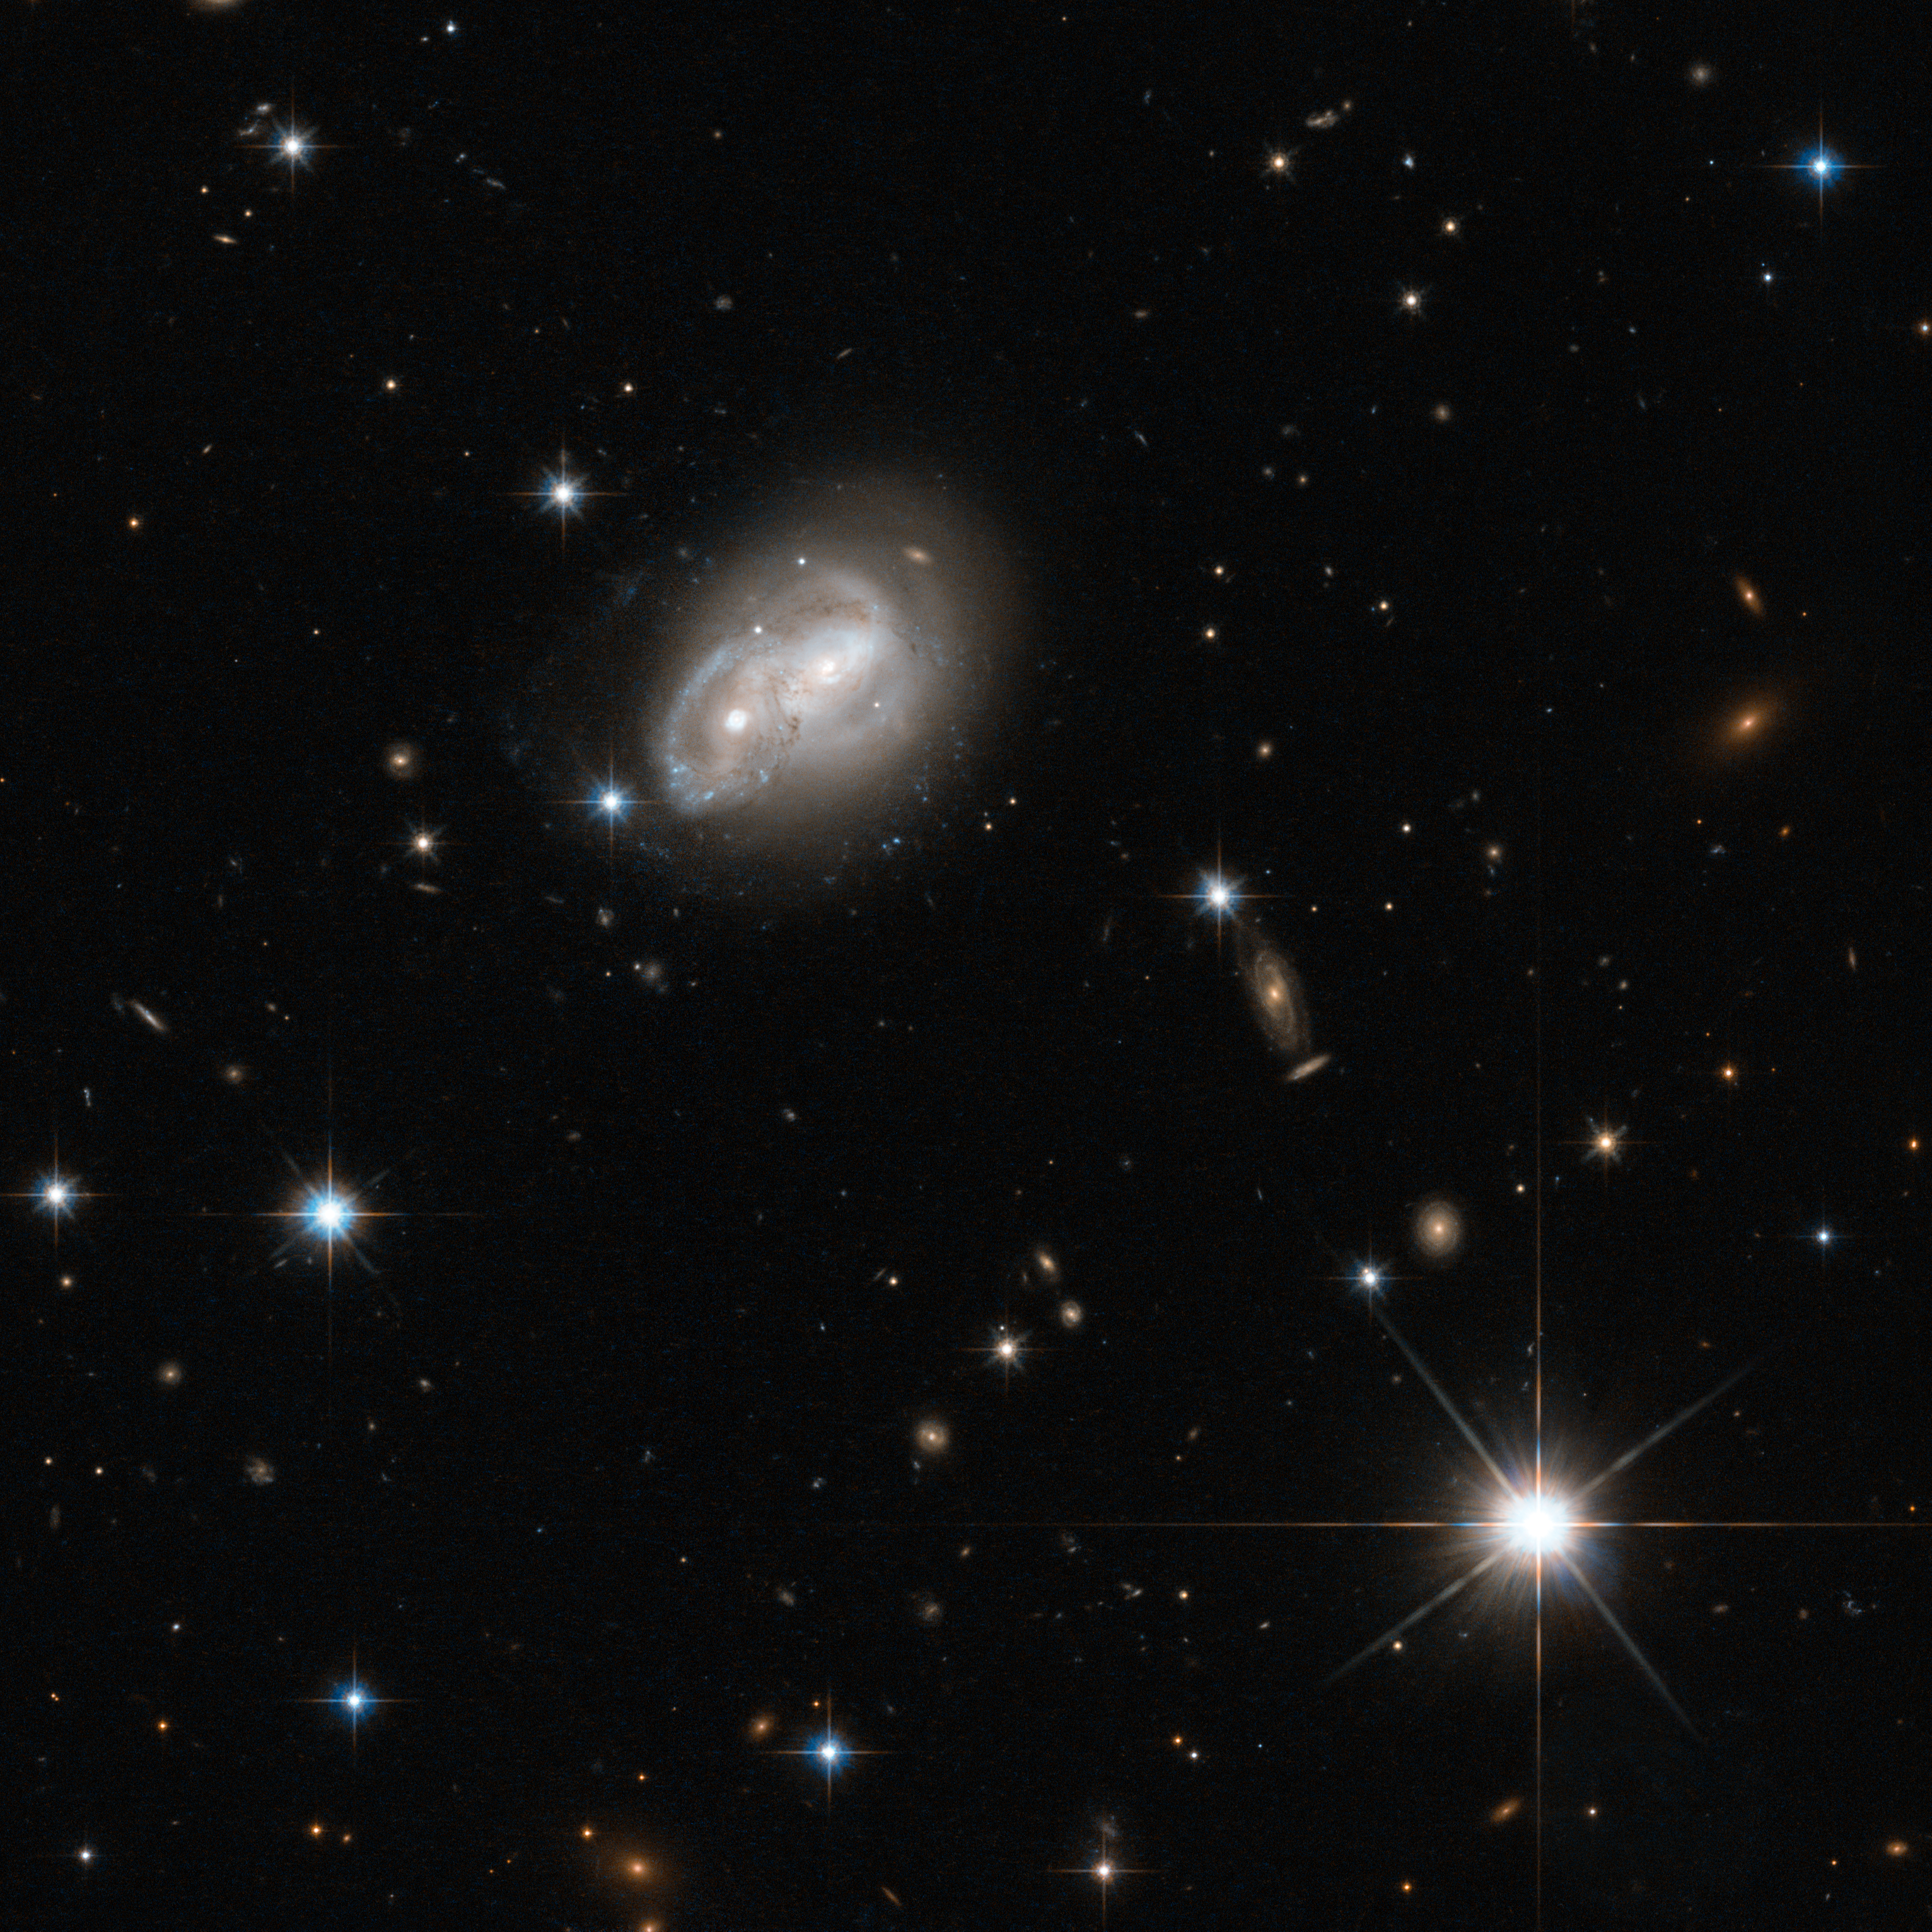

Galaxy gets a cosmic hair ruffling

From objects as small as Newton's apple to those as large as a galaxy, no physical body is free from the stern bonds of gravity, as evidenced in this stunning picture captured by the Wide Field Camera 3 and Advanced Camera for Surveys onboard the NASA/ESA Hubble Space Telescope.

Here we see two spiral galaxies engaged in a cosmic tug-of-war — but in this contest, there will be no winner. The structures of both objects are slowly distorted to resemble new forms, and in some cases, merge together to form new, super galaxies. This particular fate is similar to that of the Milky Way Galaxy, when it will ultimately merge with our closest galactic partner, the Andromeda Galaxy. There is no need to panic however, as this process takes several hundreds of millions of years.

Not all interacting galaxies result in mergers though. The merger is dependent on the mass of each galaxy, as well as the relative velocities of each body. It is quite possible that the event pictured here, romantically named 2MASX J06094582-2140234, will avoid a merger event altogether, and will merely distort the arms of each spiral without colliding — the cosmic equivalent of a hair ruffling!

These galactic interactions also trigger new regions of star formation in the galaxies involved, causing them to be extremely luminous in the infrared part of the spectrum. For this reason, these types of galaxies are referred to as LIRGs, or Luminous Infrared Galaxies. This image was taken as part of as part of a Hubble survey of the central regions of LIRGs in the local Universe, which also used the NICMOS instrument.

A version of this image was entered into the Hubble's Hidden Treasures image processing competition by contestant Luca Limatola.

Credit: ESA/Hubble & NASA Acknowledgement: Luca Limatola